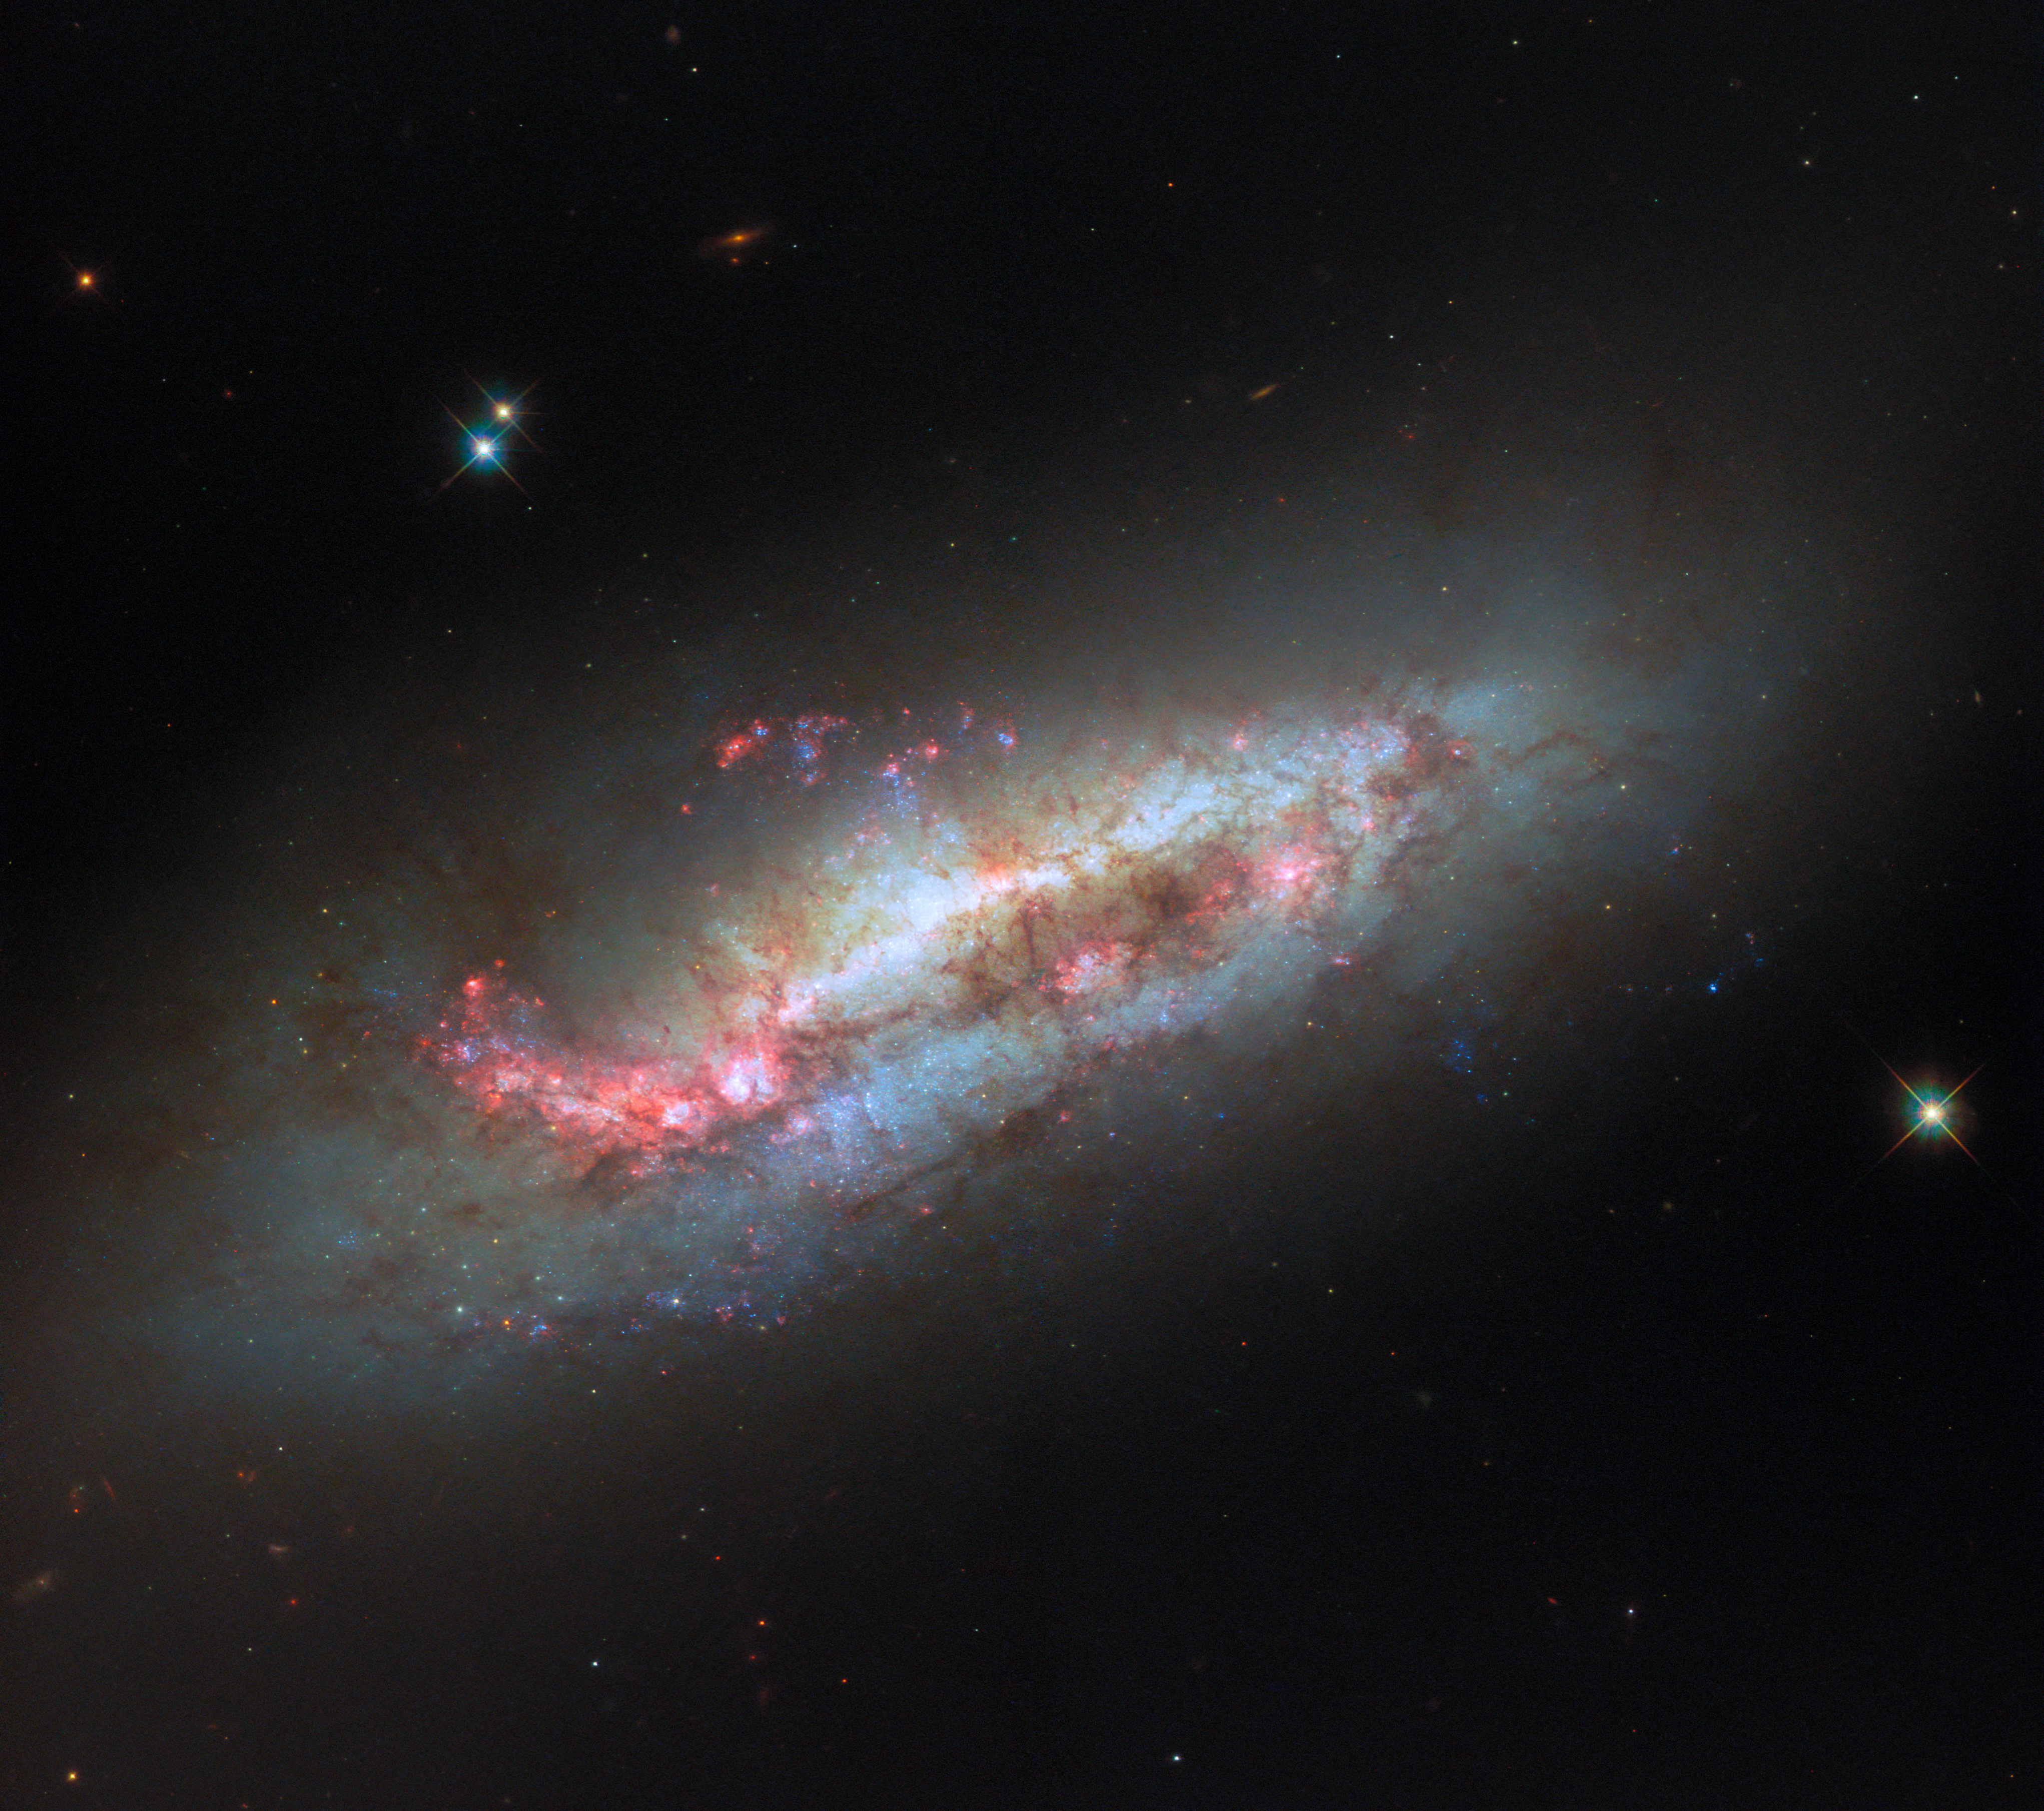

A disruptive neighbour

Though interesting to look at, NGC 1511 is one galaxy you might not want for a neighbour. Seen in this ESA/Hubble Picture of the Week, NGC 1511 is a peculiar spiral galaxy located roughly 50 million light-years away in the constellation Hydrus.

Like many galaxies, NGC 1511 doesn’t travel through space alone. Instead, it does so with a pair of small galactic companions called NGC 1511A and NGC 1511B, both of which lie outside the frame of this Hubble image. NGC 1511B is situated closest to NGC 1511, and the two galaxies have apparently clashed in the past; a narrow strand of hydrogen gas connects them, and NGC 1511B has been stretched and distorted by the encounter. Researchers have even found evidence that NGC 1511 once had another small companion galaxy that it has disrupted entirely!

These disruptions have an impact on NGC 1511, too. The galaxy is experiencing a burst of star formation, and its disc features strange loops and plumes that could point to past interactions with its neighbouring galaxies. Researchers will use Hubble’s keen observations of NGC 1511 to study star clusters embedded within its dusty gas, seeking to understand how matter is cycled from interstellar clouds to stars and back to clouds once again.

Credit: ESA/Hubble & NASA, D. Thilker